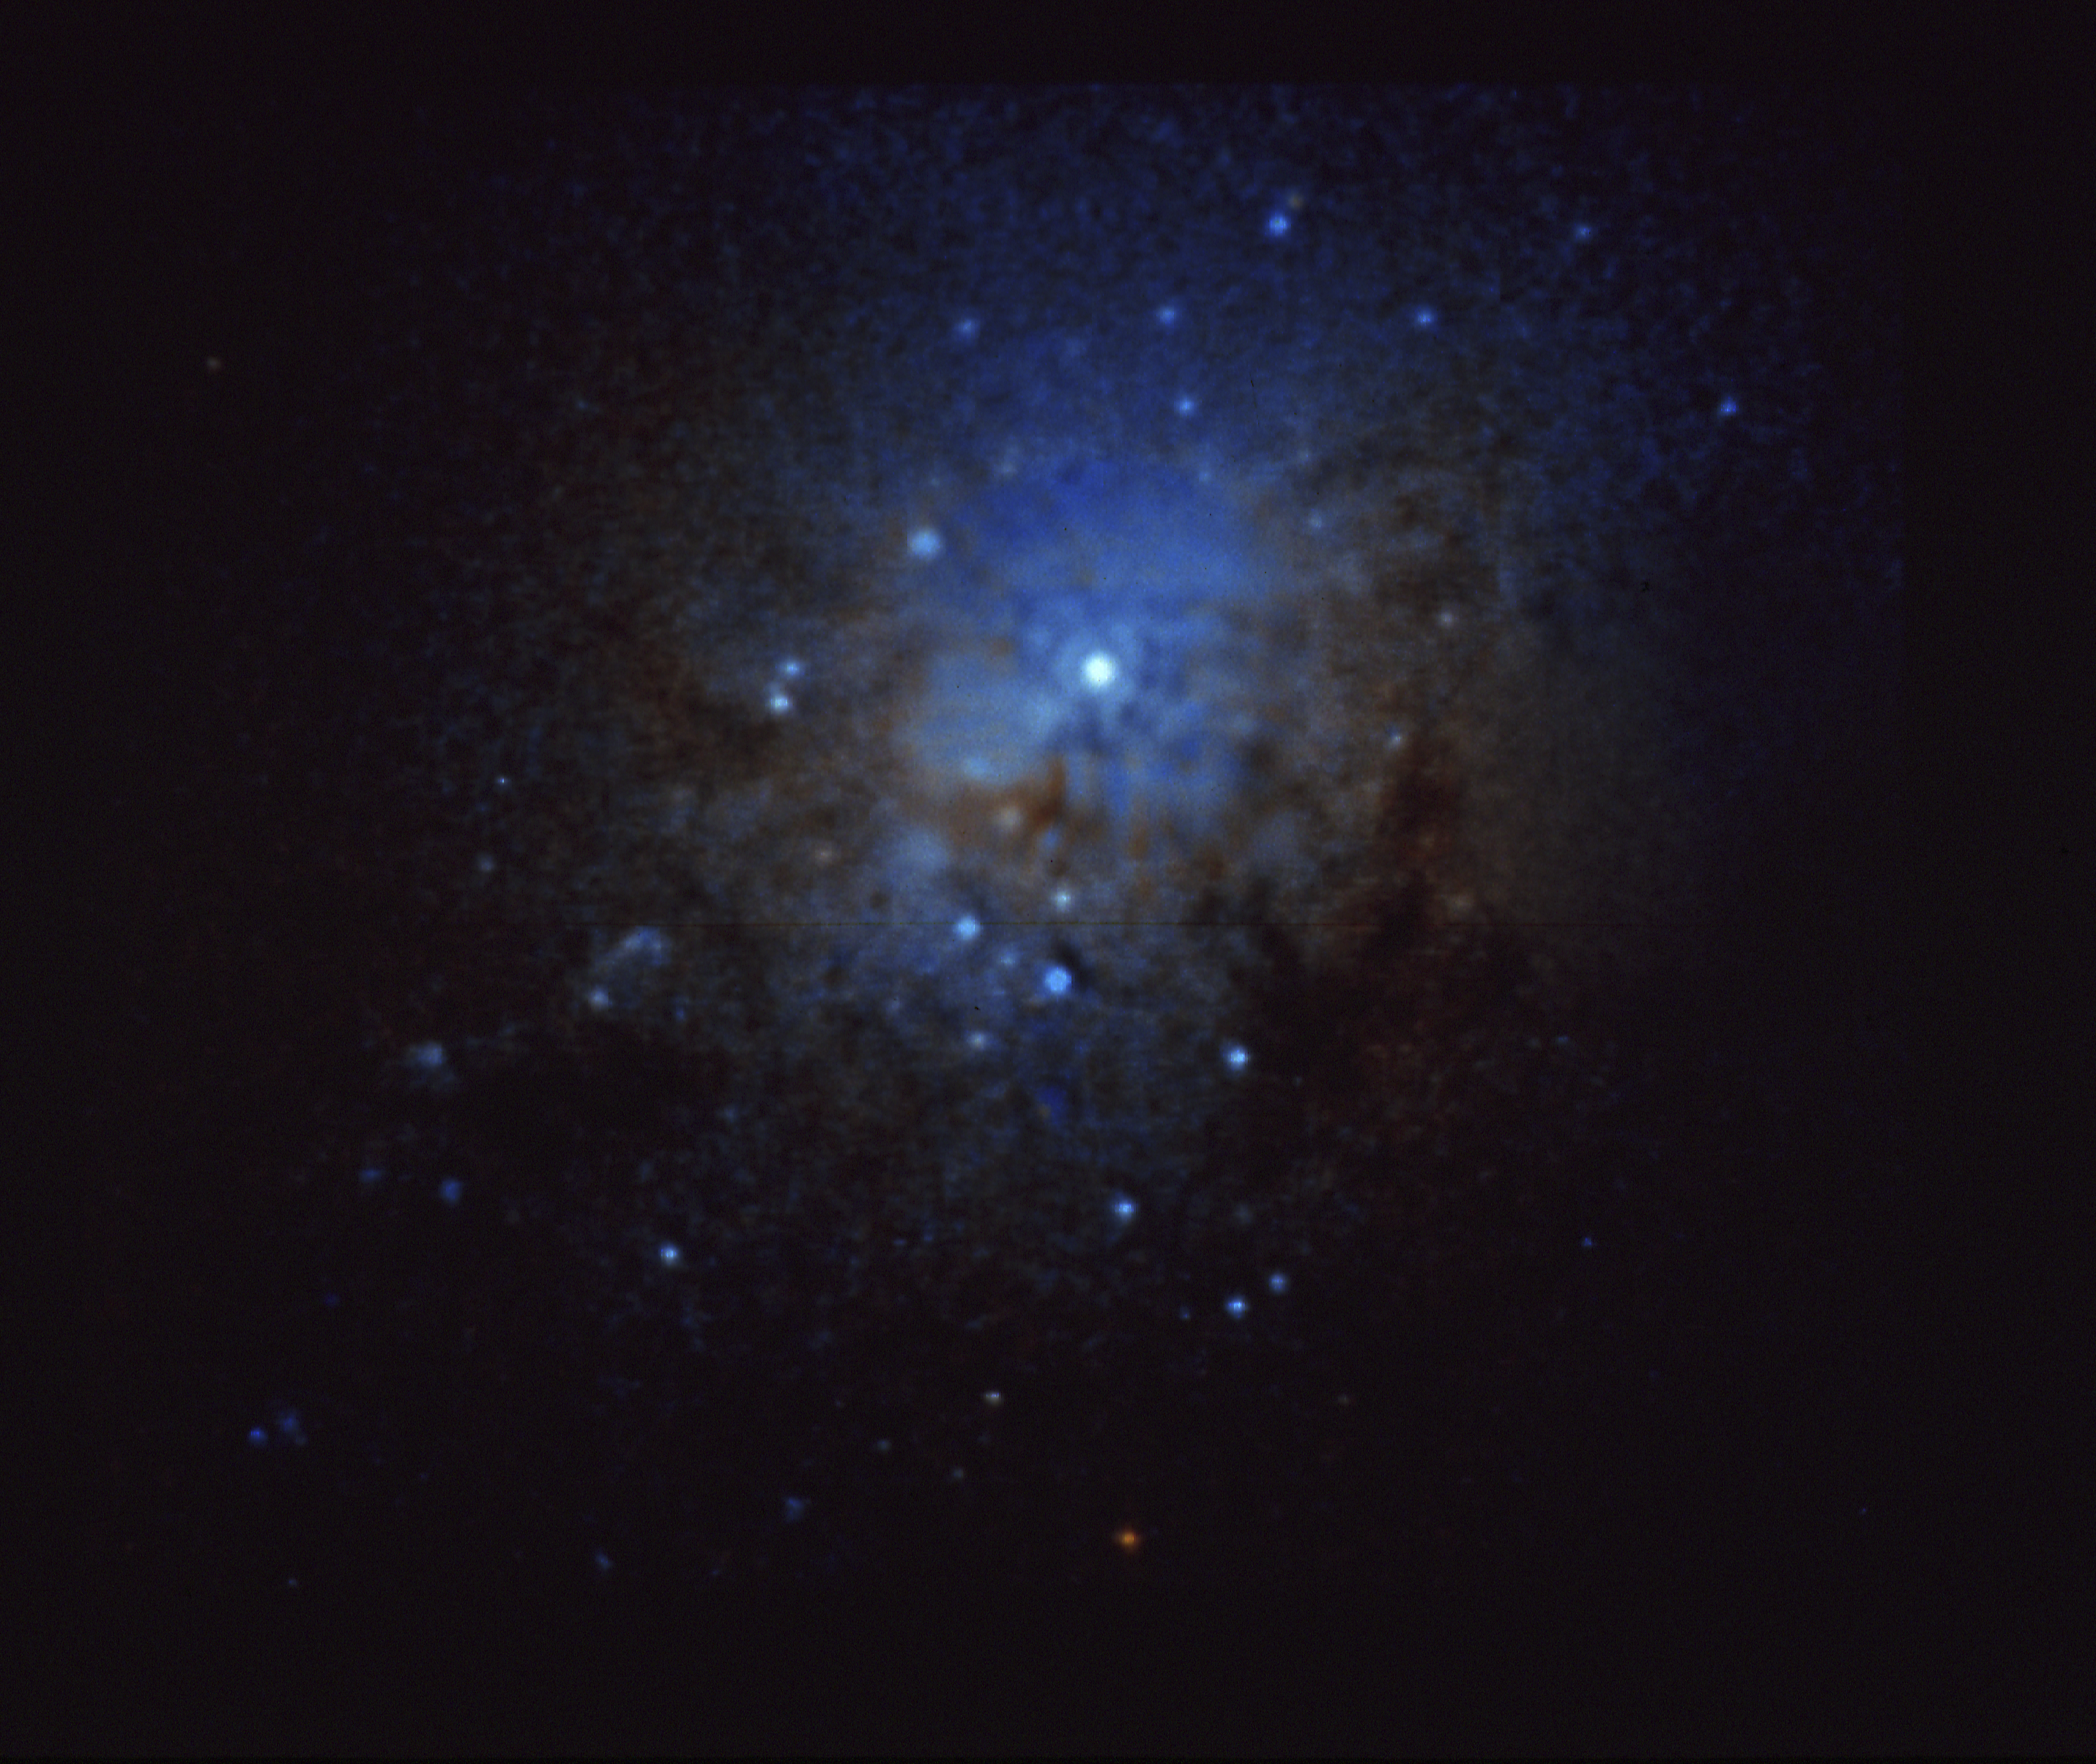

Globular clusters at the core of NGC 1275

NASA/ESA Hubble Space Telescope has provided intriguing new clues to cataclysmic events in the history of the peculiar galaxy NGC 1275, located approximately 200 million light-years from Earth.

Credit: J. Holtzman/NASA/ESA